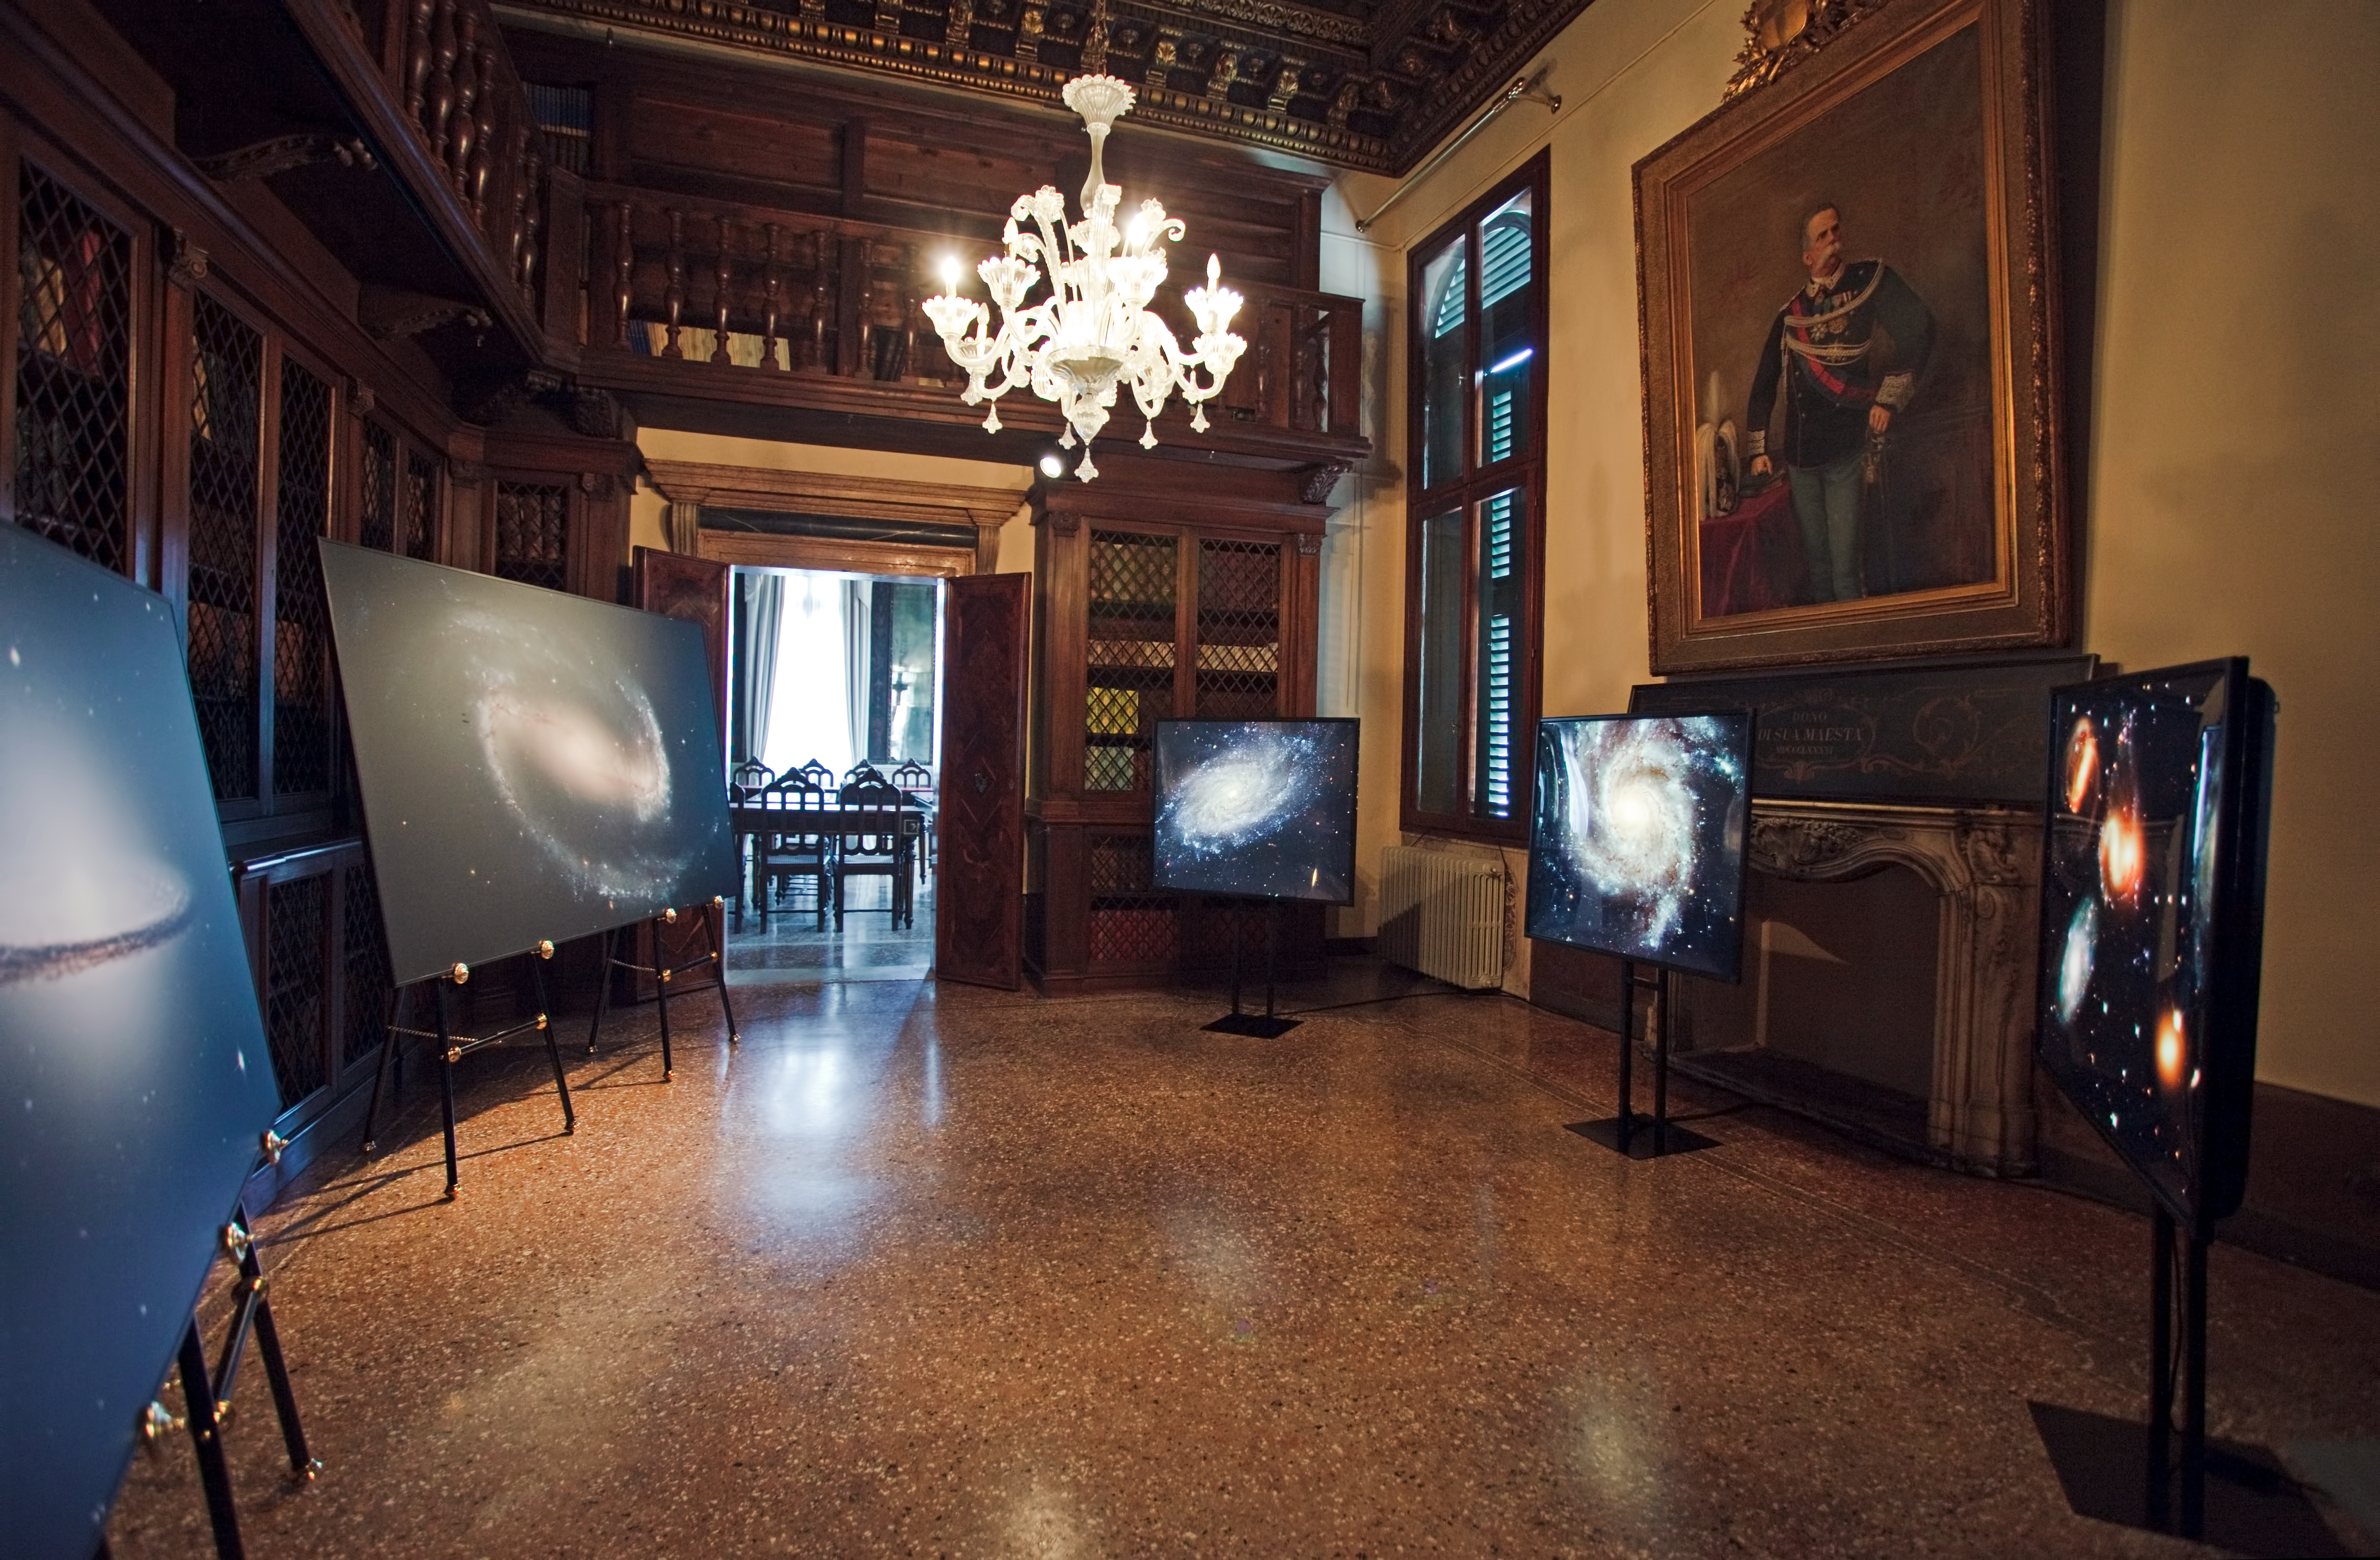

Hubble images on display

This image shows Hubble images of spiral galaxies on display at the “Il telescopio spaziale Hubble alle frontiere dell’universo” exhibition in Venice, Italy in October 2010.

Credit: ESA/Hubble